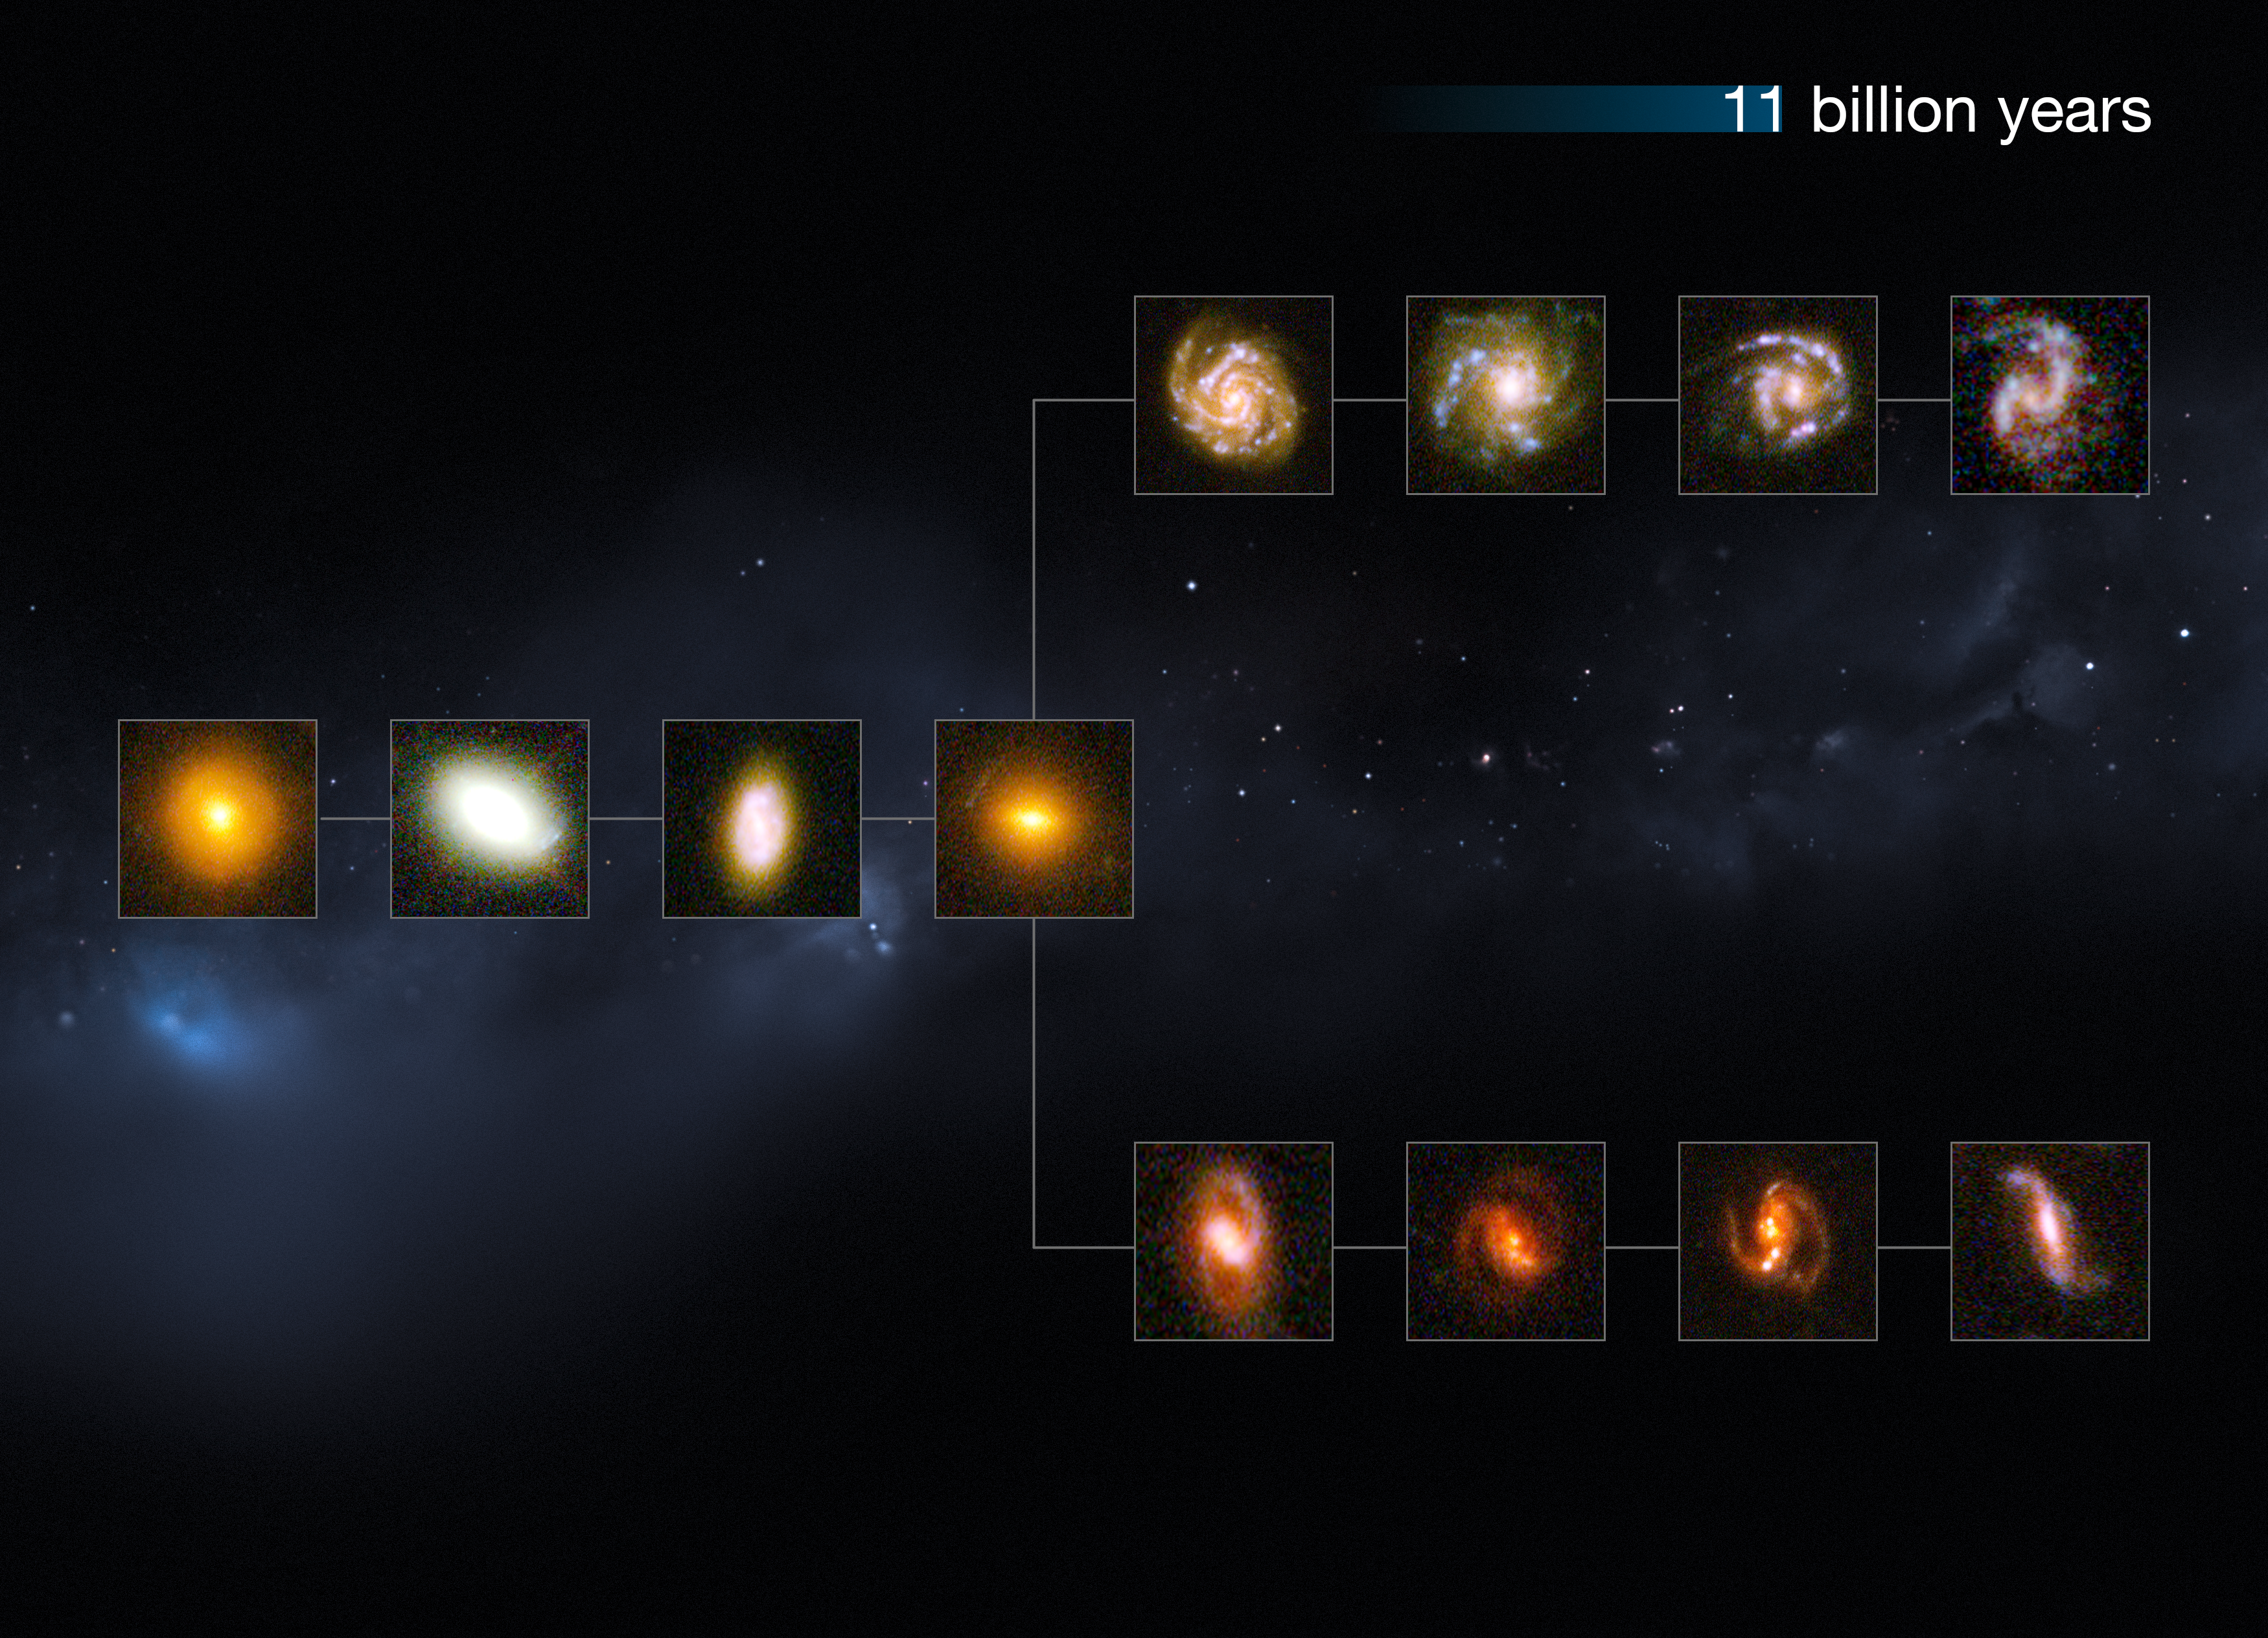

The Universe 11 billion years ago

This image shows a "slice" of the Universe some 11 billion years back in time. The shape is that of the Hubble tuning fork diagram, which describes and separates galaxies according to their morphology into spiral (S), elliptical (E), and lenticular (S0) galaxies. On the left of this diagram are the ellipticals, with lenticulars in the middle, and the spirals branching out on the right side. The spirals on the bottom branch have bars cutting through their centres. The galaxies at these distances from us are small and still in the process of forming.

This image is illustrative; the Hubble images used were selected based on their appearance. The individual distances to these galaxies are only approximate.

Credit: NASA, ESA, M. Kornmesser